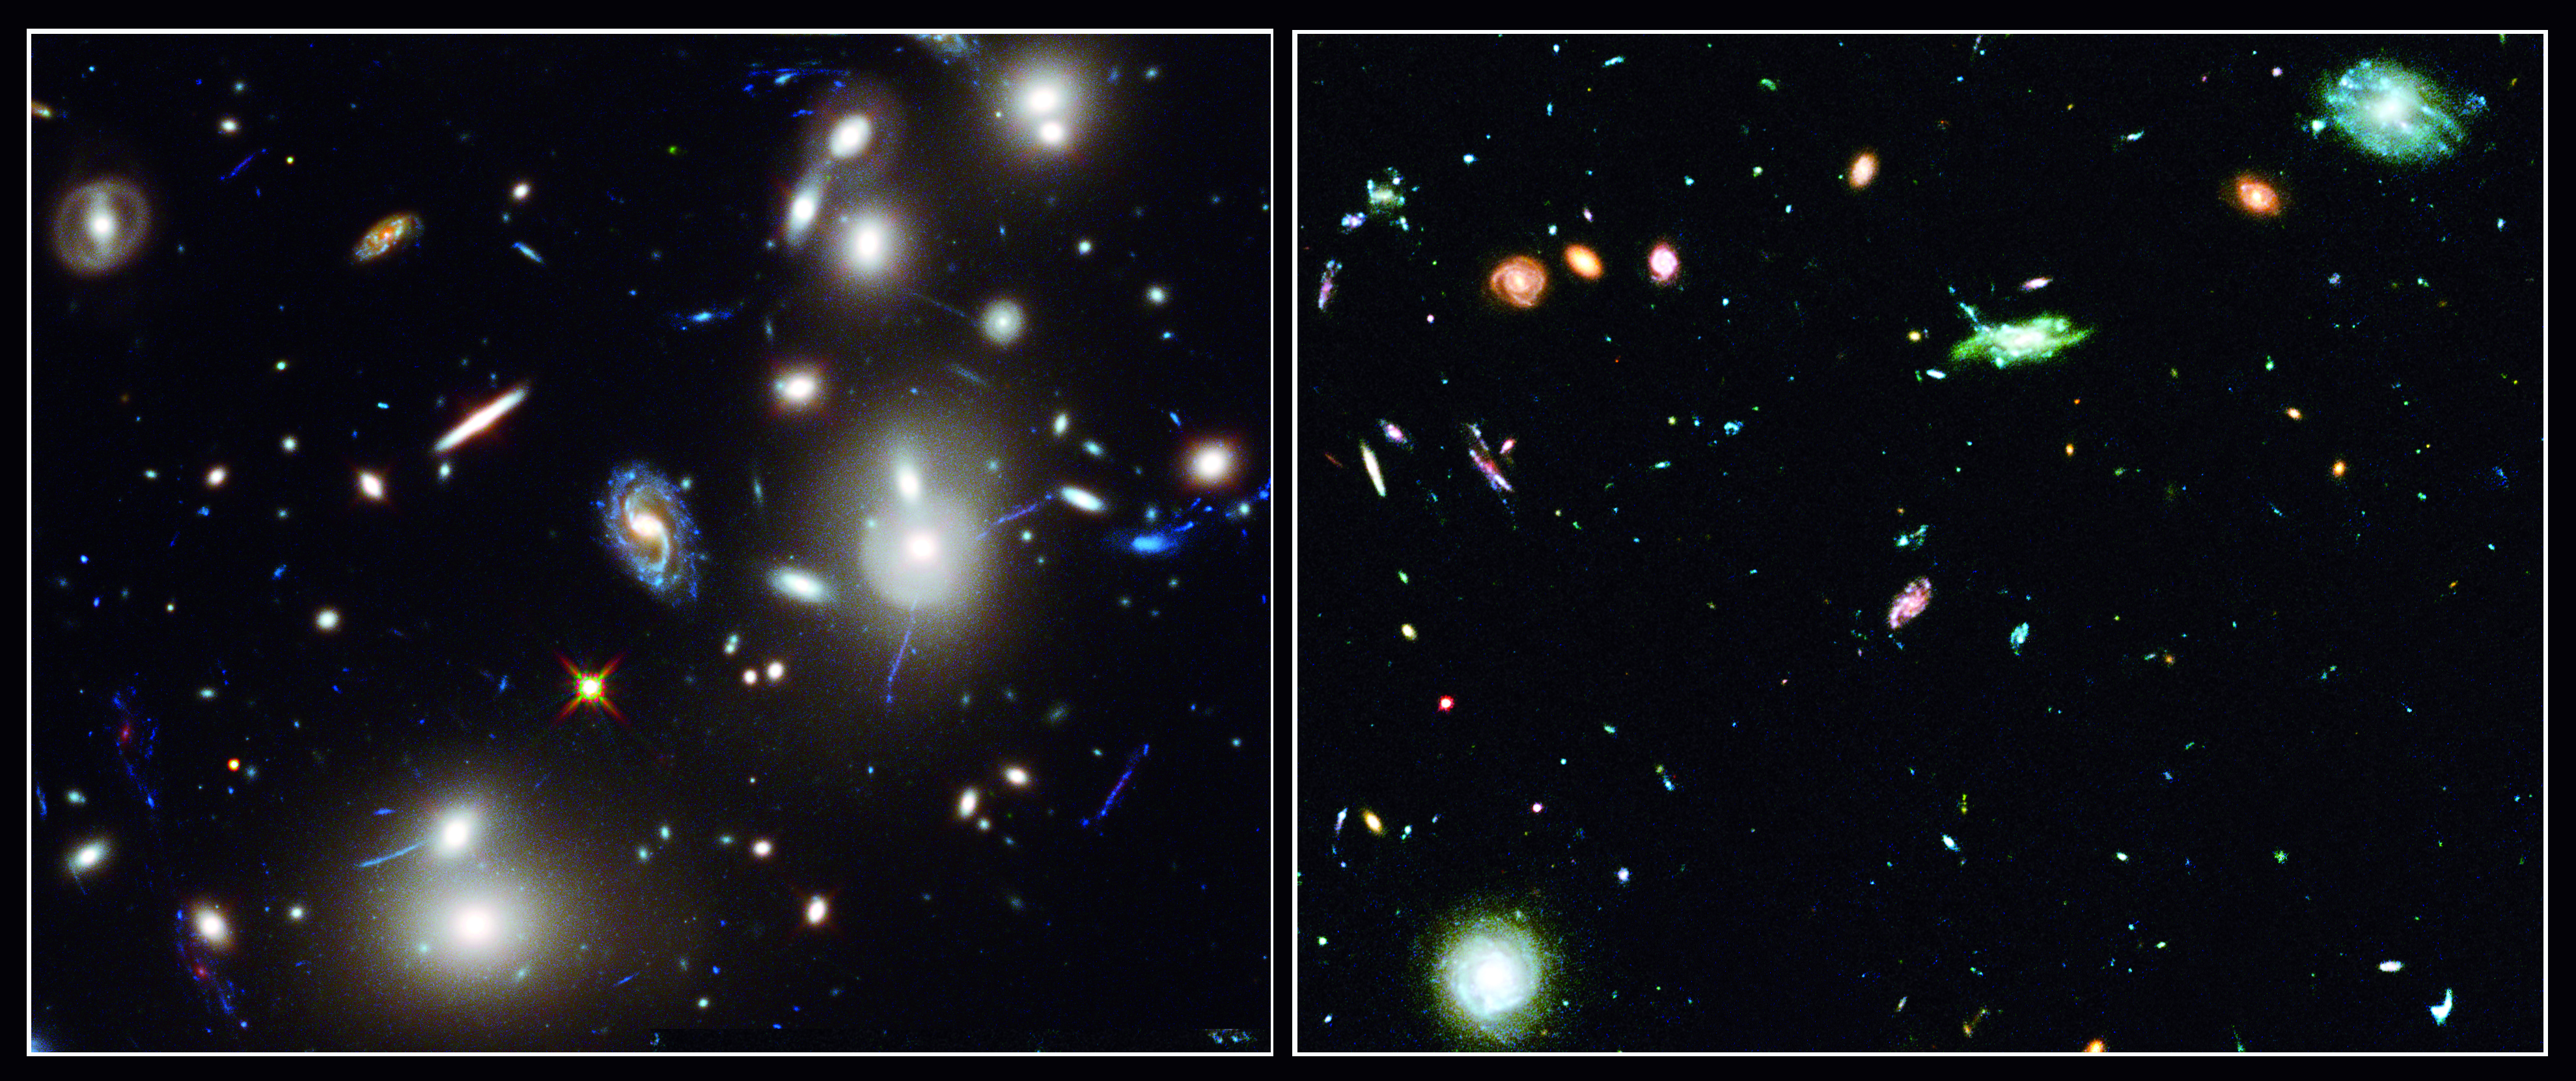

Frontier Fields: Abell 2744 and “blank” field comparison

The NASA/ESA Hubble Space Telescope and NASA’s Spitzer Space Telescope completed deep imaging of the galaxy cluster Abell 2744 (above left) and a nearby "blank" field (above right), as part of the Frontier Fields programme.

Frontier Fields is an ambitious observing programme scanning six different galaxy clusters, including Abell 2744, and studying their lensing effects.

Credit: NASA, ESA